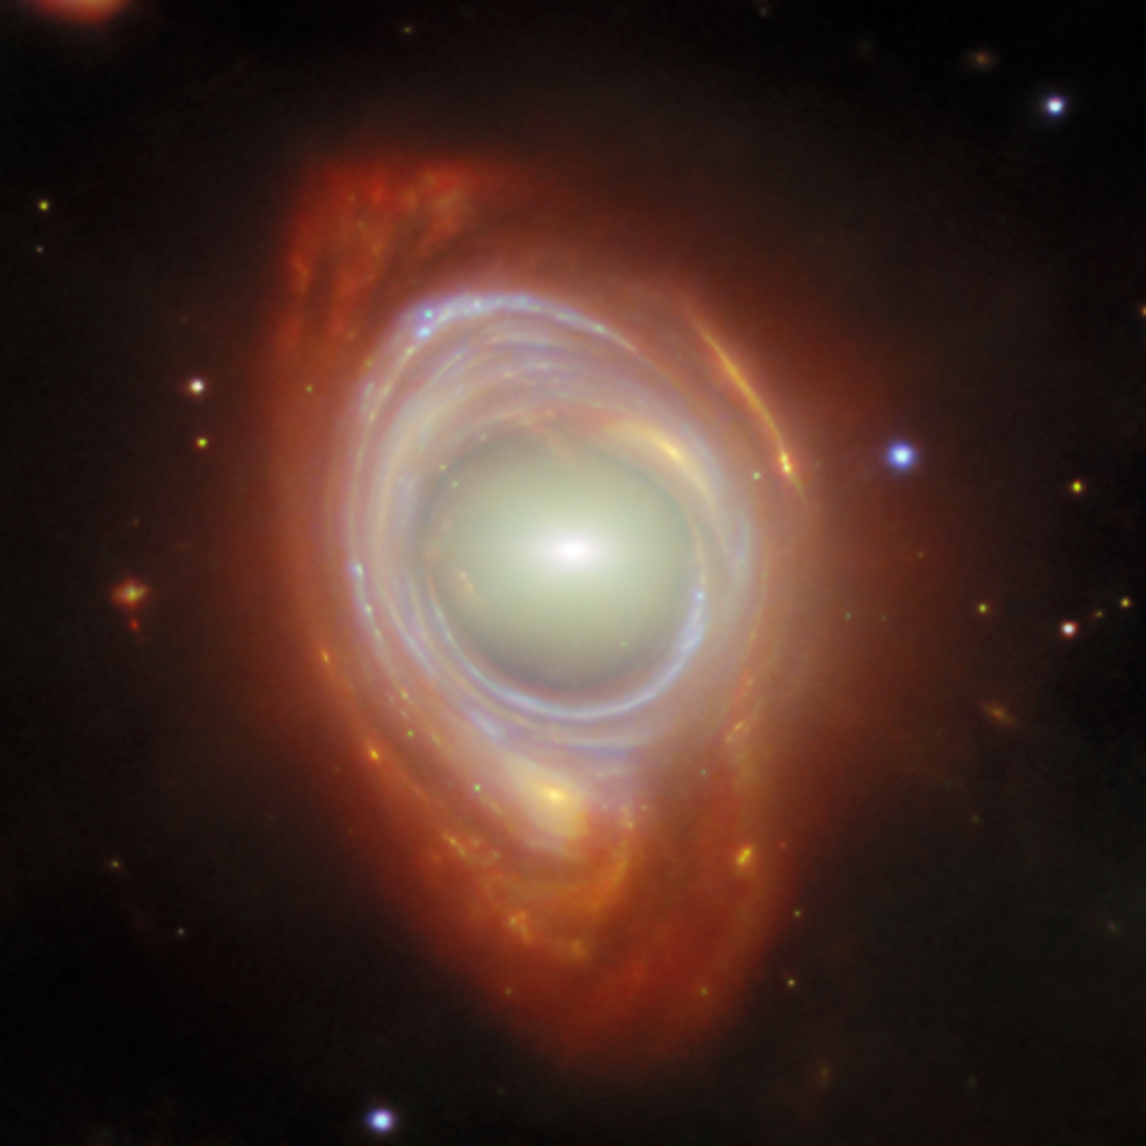

Spying a spiral through a cosmic lens

This new NASA/ESA/CSA James Webb Space Telescope Picture of the Month features a rare cosmic phenomenon called an Einstein ring. What at first appears to be a single, strangely shaped galaxy is actually two galaxies that are separated by a large distance. The closer foreground galaxy sits at the center of the image, while the more distant background galaxy appears to be wrapped around the closer galaxy, forming a ring.

Einstein rings occur when light from a very distant object is bent (or ‘lensed’) about a massive intermediate (or ‘lensing’) object. This is possible because spacetime, the fabric of the Universe itself, is bent by mass, and therefore light travelling through space and time is bent as well. This effect is much too subtle to be observed on a local level, but it sometimes becomes clearly observable when dealing with curvatures of light on enormous, astronomical scales, such as when the light from one galaxy is bent around another galaxy or galaxy cluster.

When the lensed object and the lensing object line up just so, the result is the distinctive Einstein ring shape, which appears as a full circle (as seen here) or a partial circle of light around the lensing object, depending on the precision of the alignment. Objects like these are the ideal laboratory in which to research galaxies too faint and distant to otherwise see.

The lensing galaxy at the center of this Einstein ring is an elliptical galaxy, as can be seen from the galaxy’s bright core and smooth, featureless body. This galaxy belongs to a galaxy cluster named SMACSJ0028.2-7537. The lensed galaxy wrapped around the elliptical galaxy is a spiral galaxy. Even though its image has been warped as its light travelled around the galaxy in its path, individual star clusters and gas structures are clearly visible.

The Webb data used in this image were taken as part of the Strong Lensing and Cluster Evolution (SLICE) survey (programme 5594), which is led by Guillaume Mahler at University of Liège in Belgium, and consists of a team of international astronomers. This survey aims to trace 8 billion years of galaxy cluster evolution by targeting 182 galaxy clusters with Webb’s Near-InfraRed Camera instrument. This image also incorporates data from two of the NASA/ESA Hubble Space Telescope’s instruments, the Wide Field Camera 3 and the Advanced Camera for Surveys.

Credit: ESA/Webb, NASA & CSA, G. Mahler Acknowledgement: M. A. McDonald